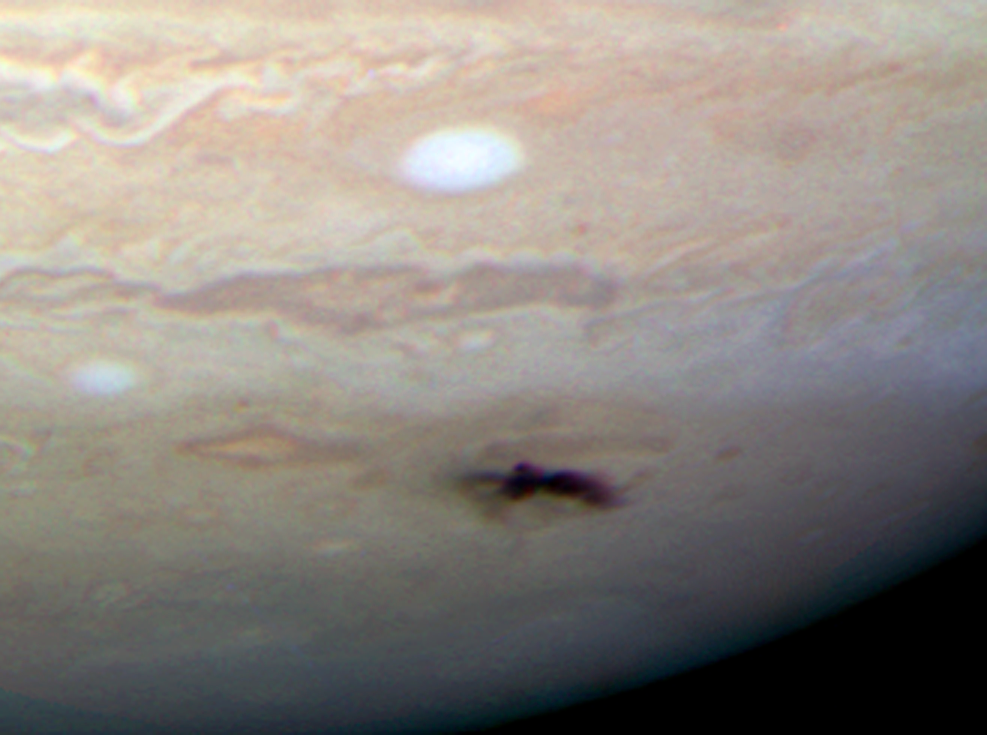

Closeup of new dark spot on Jupiter

Closeup view of the new dark spot on Jupiter taken with Hubble's Wide Field Camera 3 on 23 July 2009.

Credit: NASA, ESA and H. Hammel (Space Science Institute, Boulder, Colorado) and the Jupiter Comet Impact Team